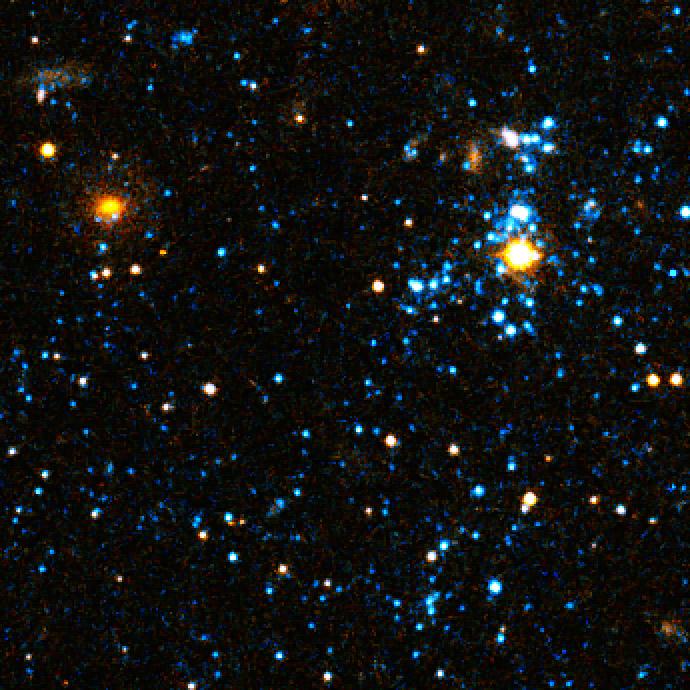

Close-up on "blue blobs"

A Hubble Space Telescope visible light close-up of bright blue star clusters in Arp's Loop in the M81-M82 galaxy group.

Credit: NASA, ESA, and D. de Mello (Catholic University of America/GSFC)